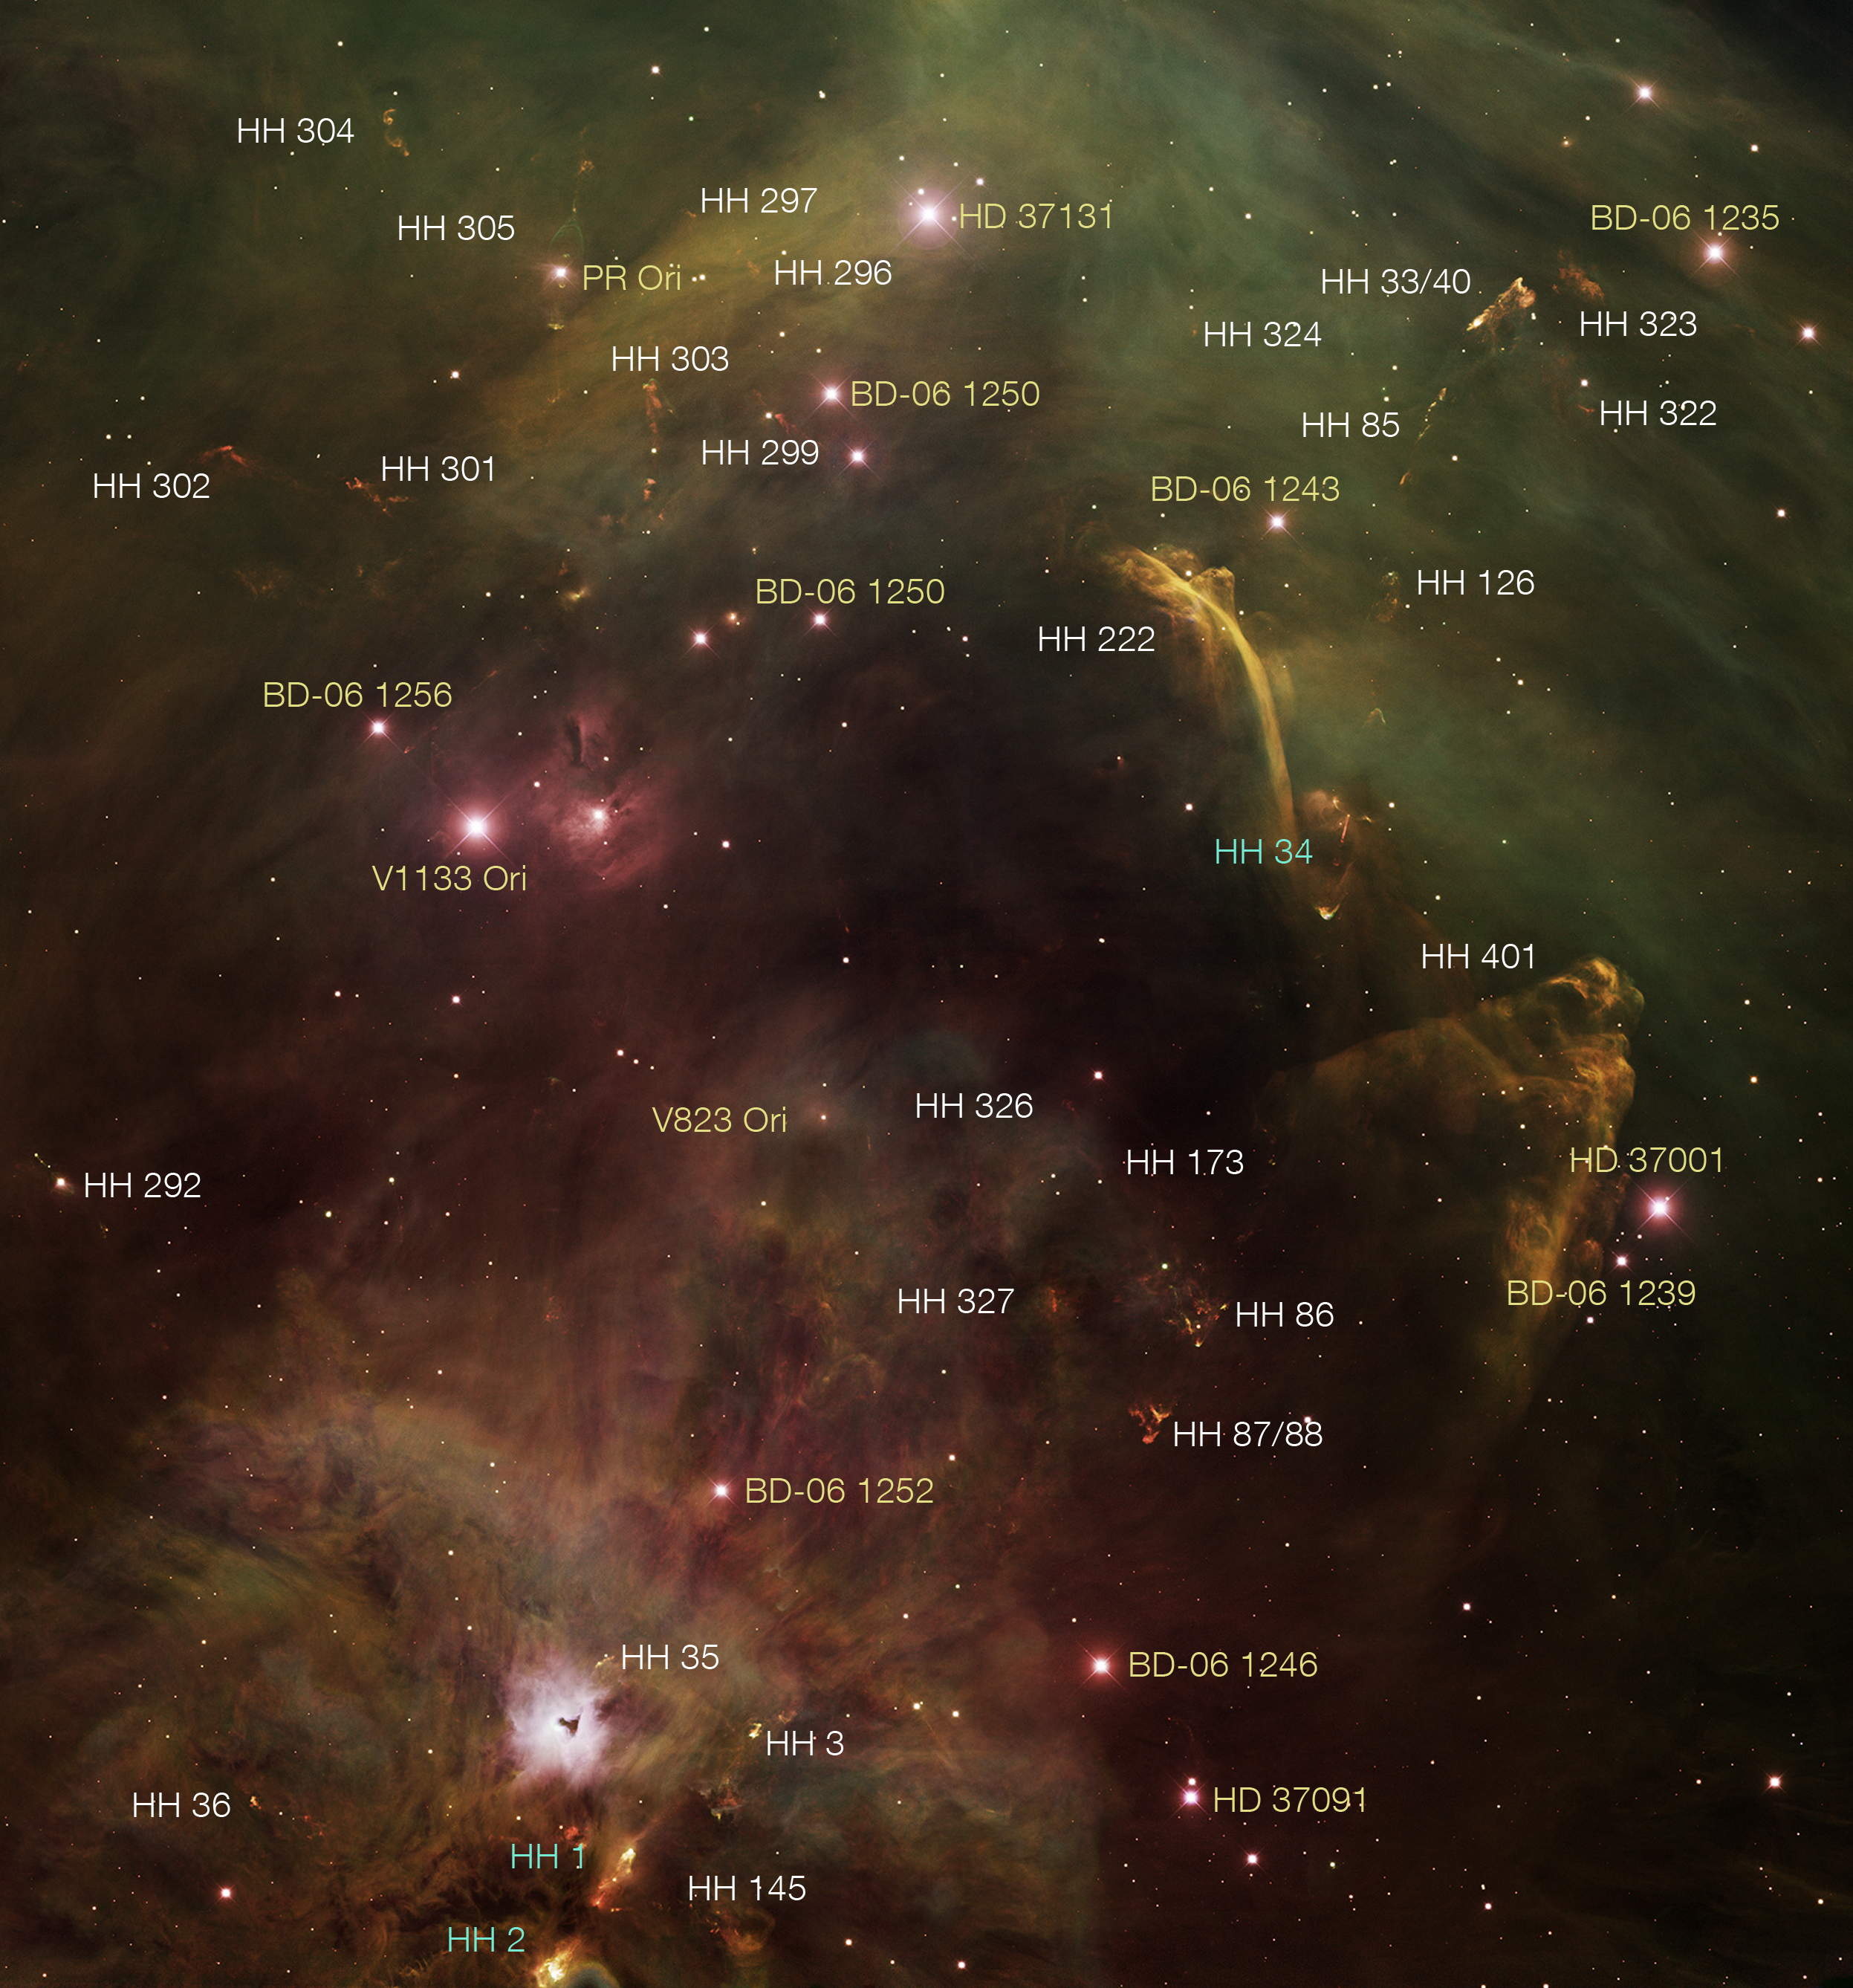

Herbig-Haro objects in the Orion Complex (ground-based image)

This image from the Kitt Peak National Observatory (KPNO) 4-metre telescope shows a roughly 1/2-degree square region of the sky in the constellation of Orion (about the same size as the diameter of the full Moon). This is a small part of the Orion Molecular Cloud Complex, a giant region of gas and dust undergoing active star formation some 1500 light-years away.

Numerous small knots known as Herbig-Haro Objects, labelled in white on the illustration, are signatures of recently formed stars ejecting material into space. The three HH objects labelled in green have been subjects of intense study by the NASA/ESA Hubble Space Telescope over several years, resulting in a better understanding of how the material ejected from stars interacts with the surrounding medium.

Credit: Z. Levay (STScI), T.A. Rector (University of Alaska Anchorage), and H. Schweiker (NOAO/AURA/NSF)